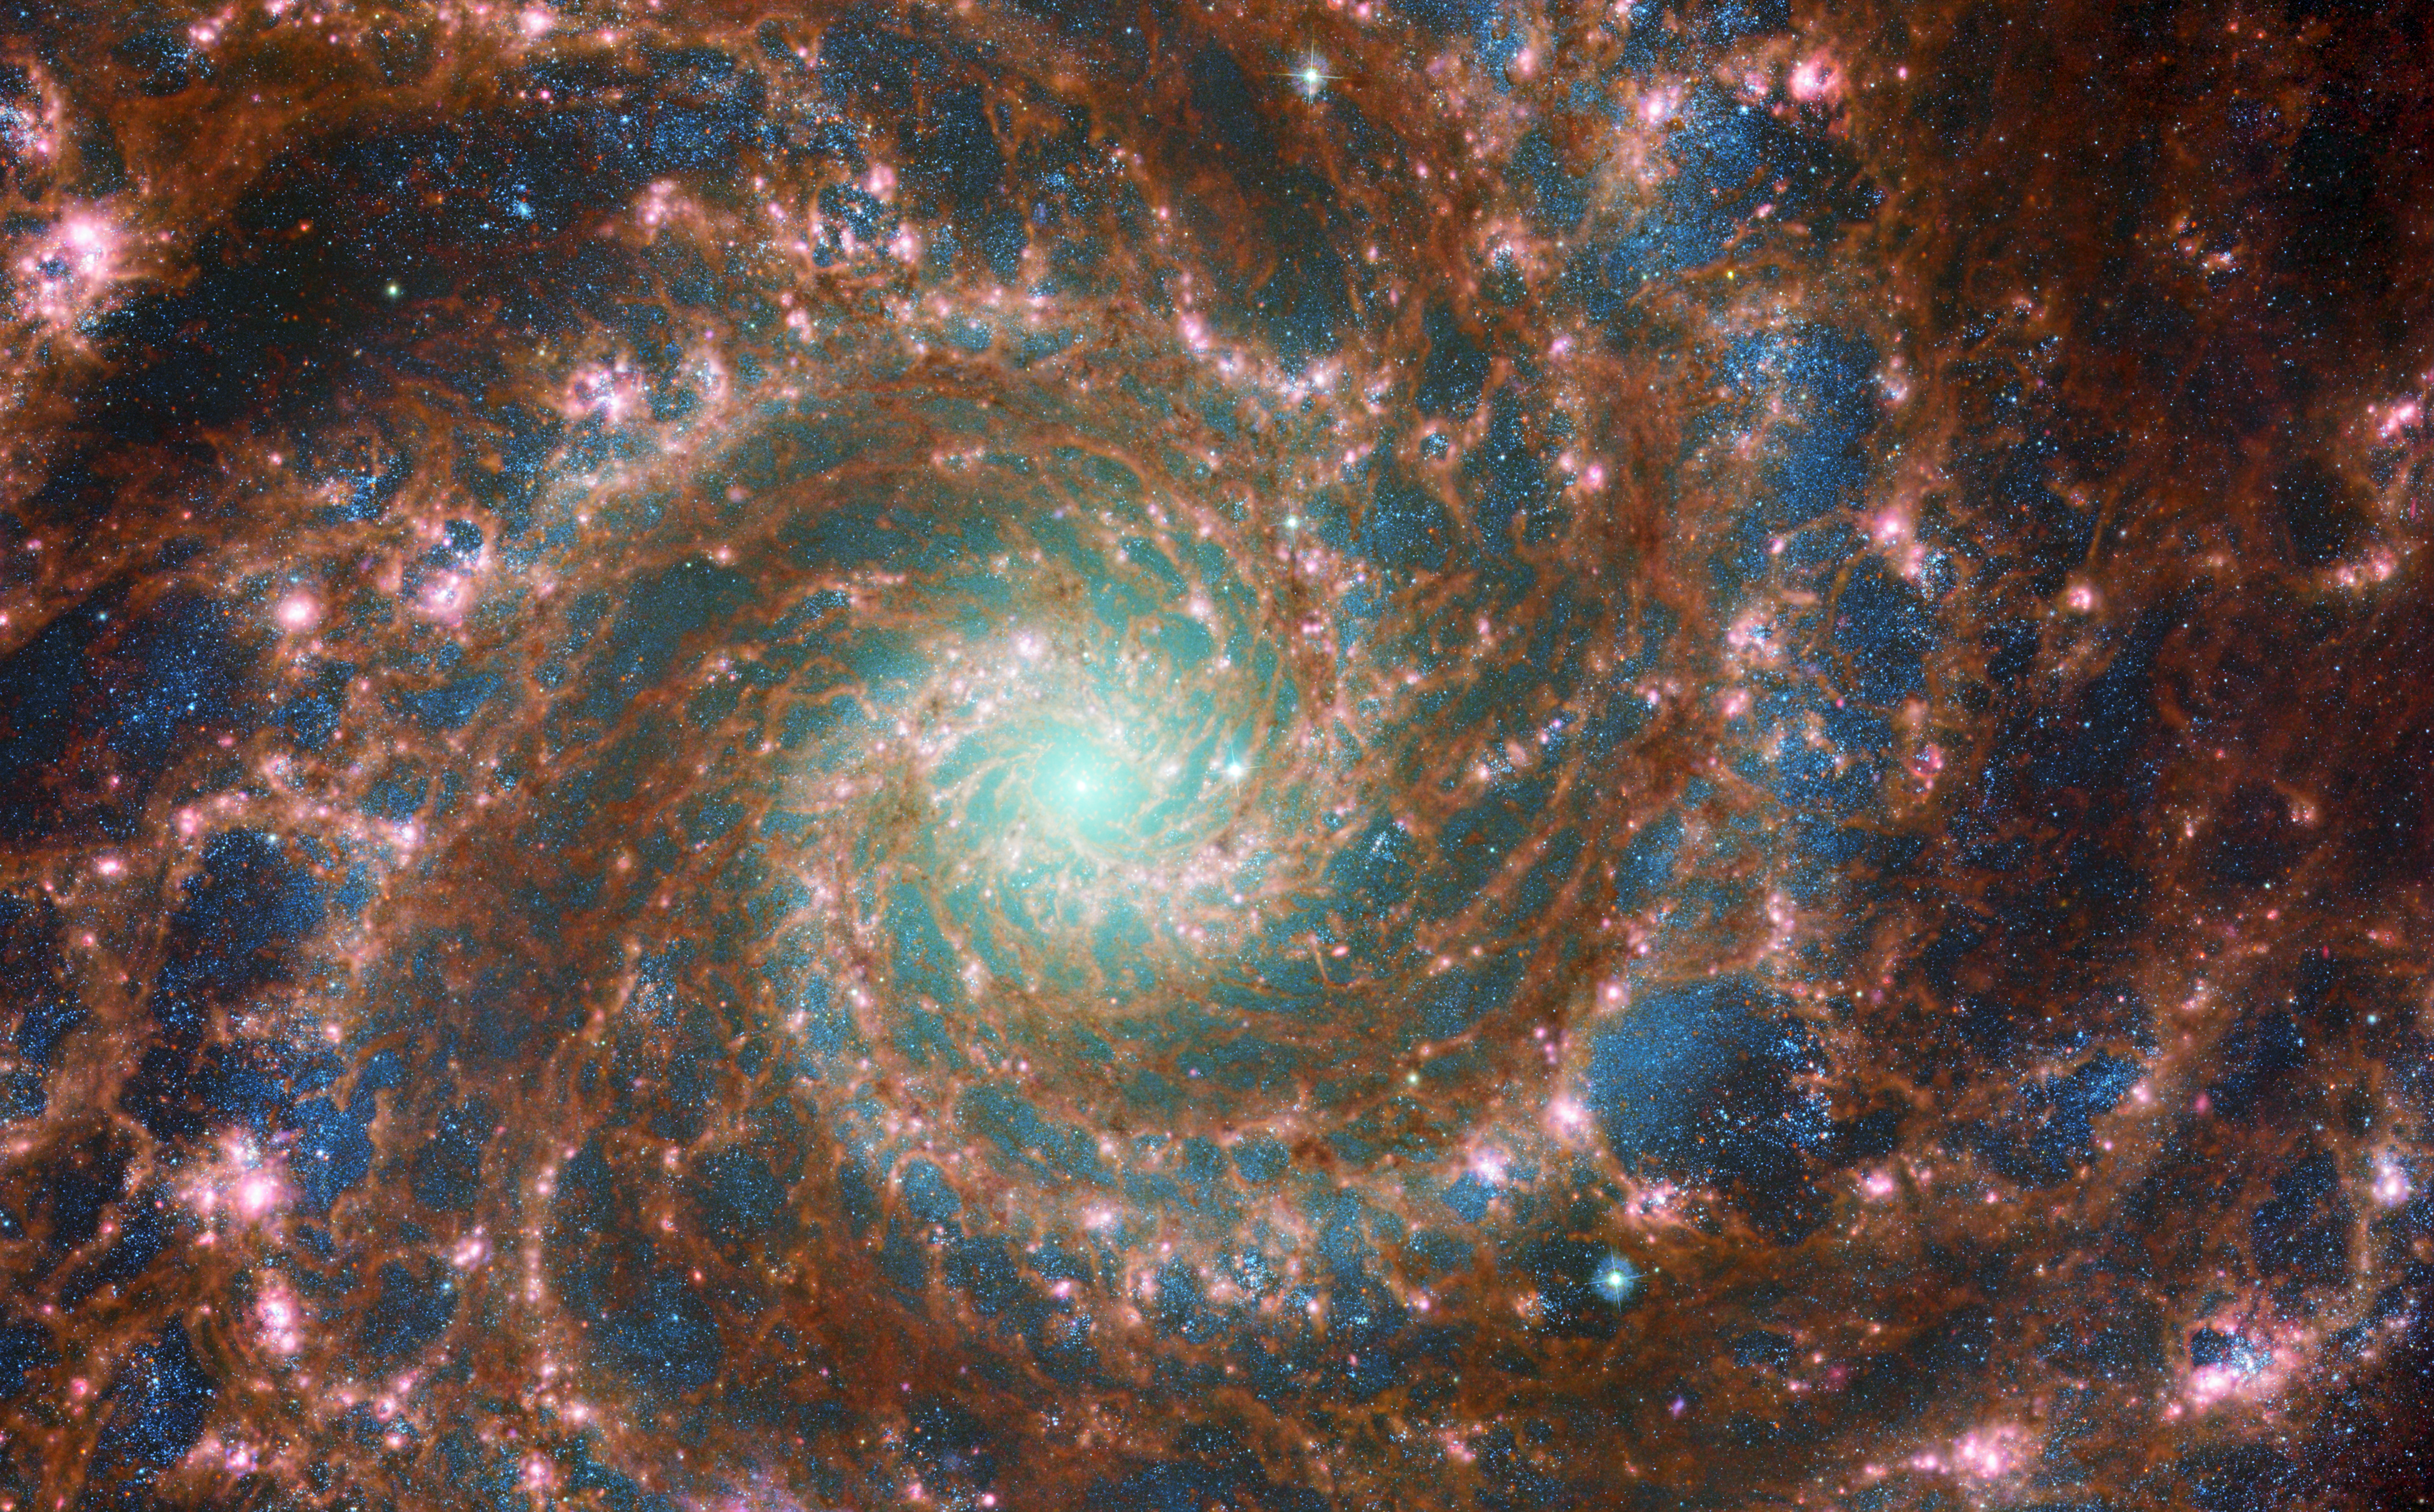

The Phantom Galaxy Across the Spectrum

M74 shines at its brightest in this combined optical/mid-infrared image, featuring data from both the NASA/ESA Hubble Space Telescope and the NASA/ESA/CSA James Webb Space Telescope.

With Hubble’s venerable Advanced Camera for Surveys (ACS) and Webb’s powerful Mid-InfraRed Instrument (MIRI) capturing a range of wavelengths, this new image has remarkable depth. The red colours mark dust threaded through the arms of the galaxy, lighter oranges being areas of hotter dust. The young stars throughout the arms and the nuclear core are picked out in blue. Heavier, older stars towards the galaxy’s centre are shown in cyan and green, projecting a spooky glow from the core of the Phantom Galaxy. Bubbles of star formation are also visible in pink across the arms. Such a variety of galactic features is rare to see in a single image.

Scientists combine data from telescopes operating across the electromagnetic spectrum to truly understand astronomical objects. In this way, data from Hubble and Webb compliment each other to provide a comprehensive view of the spectacular M74 galaxy.

Credit: ESA/Webb, NASA & CSA, J. Lee and the PHANGS-JWST Team; ESA/Hubble & NASA, R. Chandar Acknowledgement: J. Schmidt